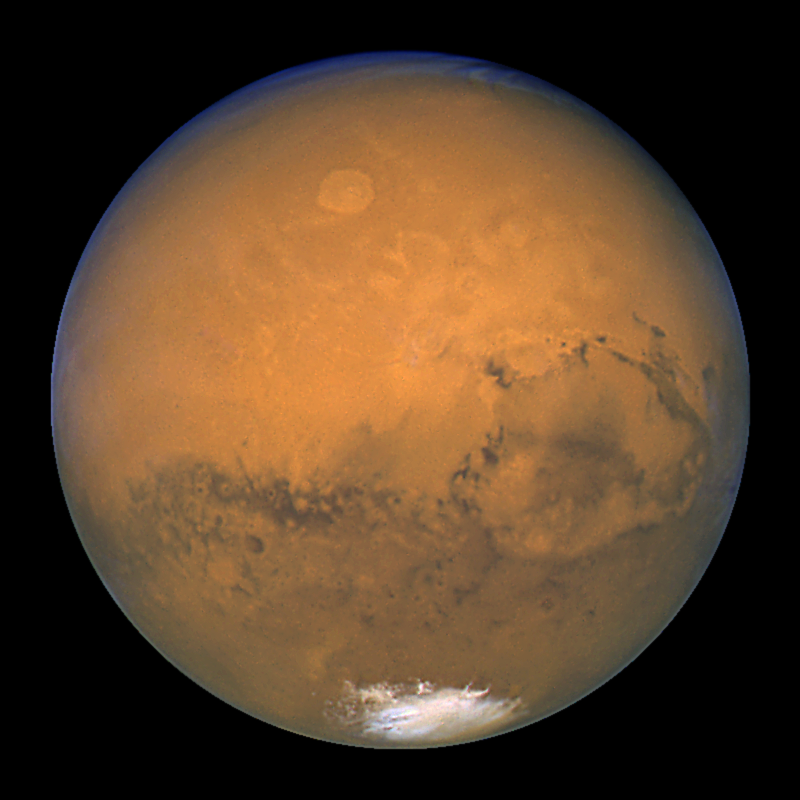

Hubble's Close Encounter with Mars

NASA/ESA Hubble Space Telescope took this close-up of the red planet Mars when it was just 55, 760, 220 km away. This colour image was assembled from a series of exposures taken between 6:20 p.m. and 7:12 p.m. EDT Aug. 26 with Hubble's Wide Field and Planetary Camera 2. The picture was taken just 11 hours before the planet made its closest approach to Earth in 60, 000 years. Many small, dark, circular impact craters can be seen, attesting to the Hubble telescope's ability to reveal fine detail on the planet's surface. One of the most striking is the 450-km diameter Huygens crater, seen near the centre of the image.

Credit: NASA/ESA, J. Bell (Cornell U.) and M. Wolff (SSI)